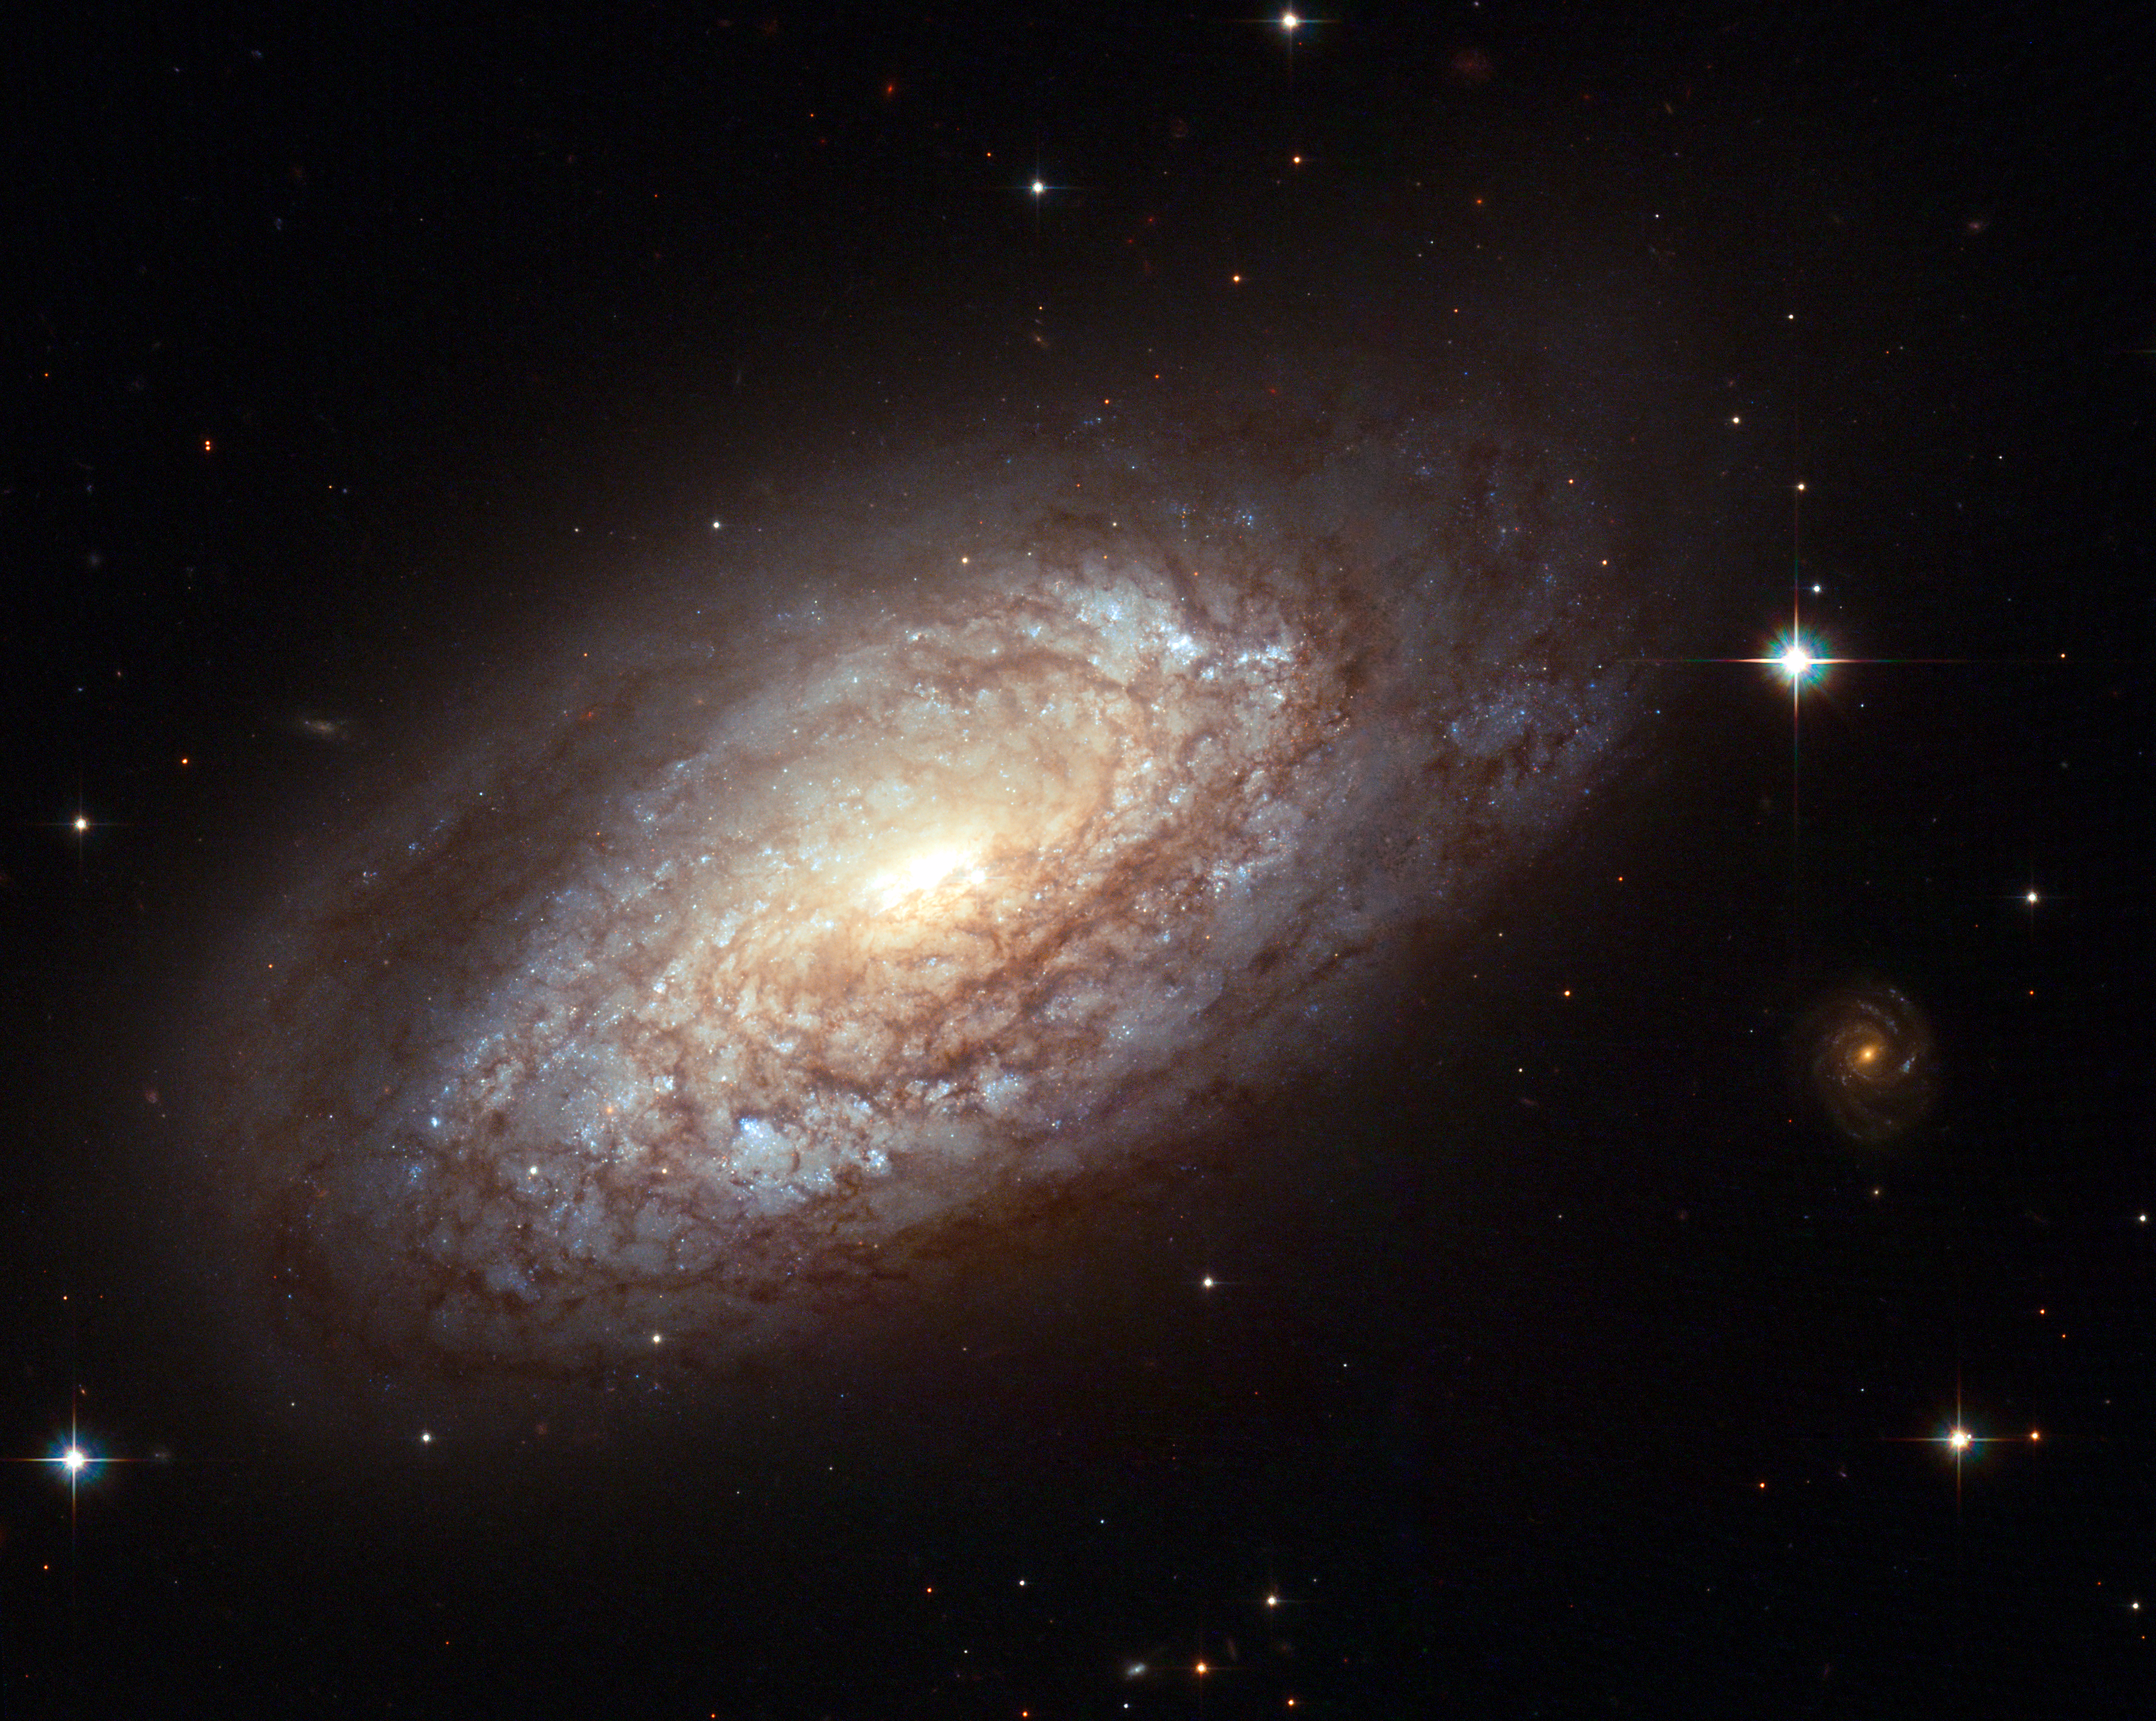

Galaxy NGC 2397 with an explosive secret

NGC 2397, pictured in this image from Hubble, is a classic spiral galaxy with long prominent dust lanes along the edges of its arms, seen as dark patches and streaks silhouetted against the starlight. Hubble's exquisite resolution allows the study of individual stars in nearby galaxies.

Located nearly 60 million light-years away from Earth, the galaxy NGC 2397 is typical of most spirals, with mostly older, yellow and red stars in its central portion, while star formation continues in the outer, bluer spiral arms. The brightest of these young, blue stars can be seen individually in this high resolution view from the Hubble's Advanced Camera for Surveys (ACS).

Credit: NASA, ESA & Stephen Smartt (Queen's University Belfast, UK)